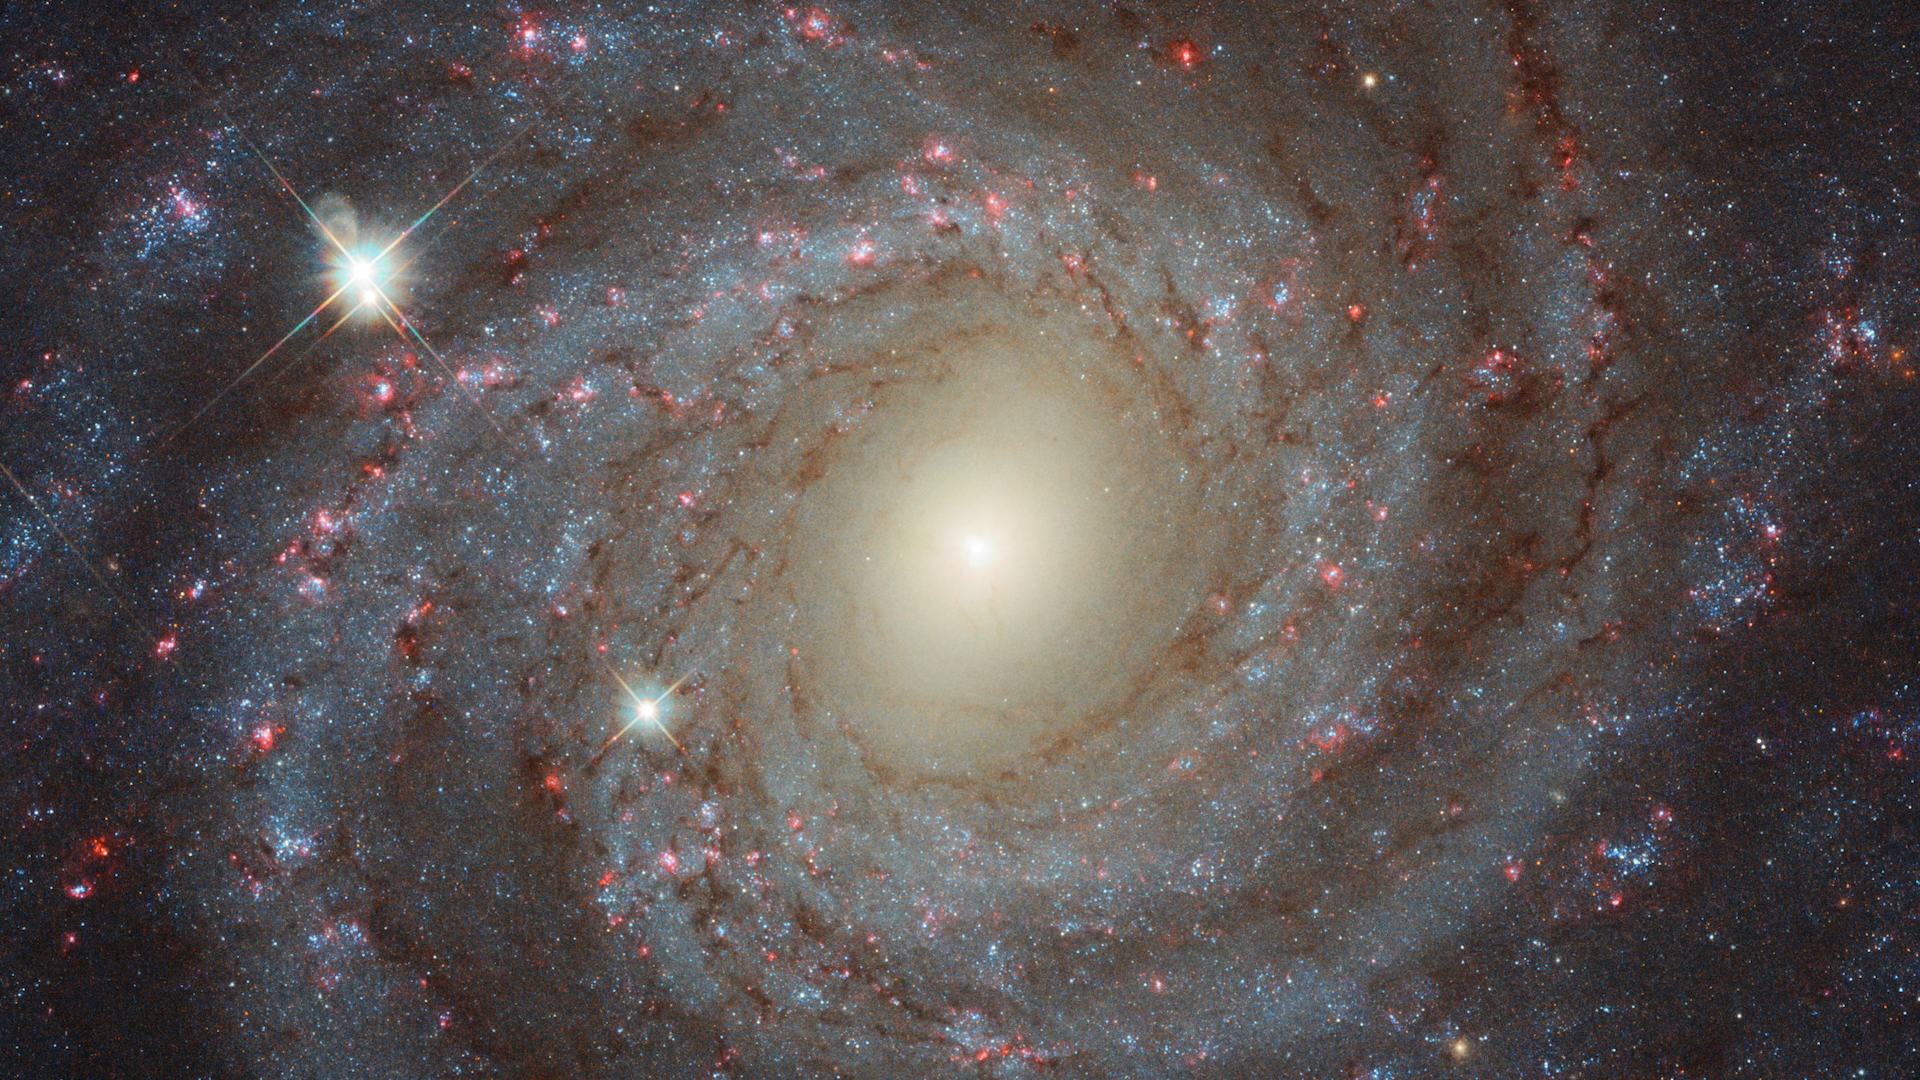

Still from Hubblecast 107: The meaningful colours of NGC 3344

This is a still from Hubblecast 107, which explains the meaning of the colours in the spiral galaxy NGC 3344.

Credit: ESA/Hubble